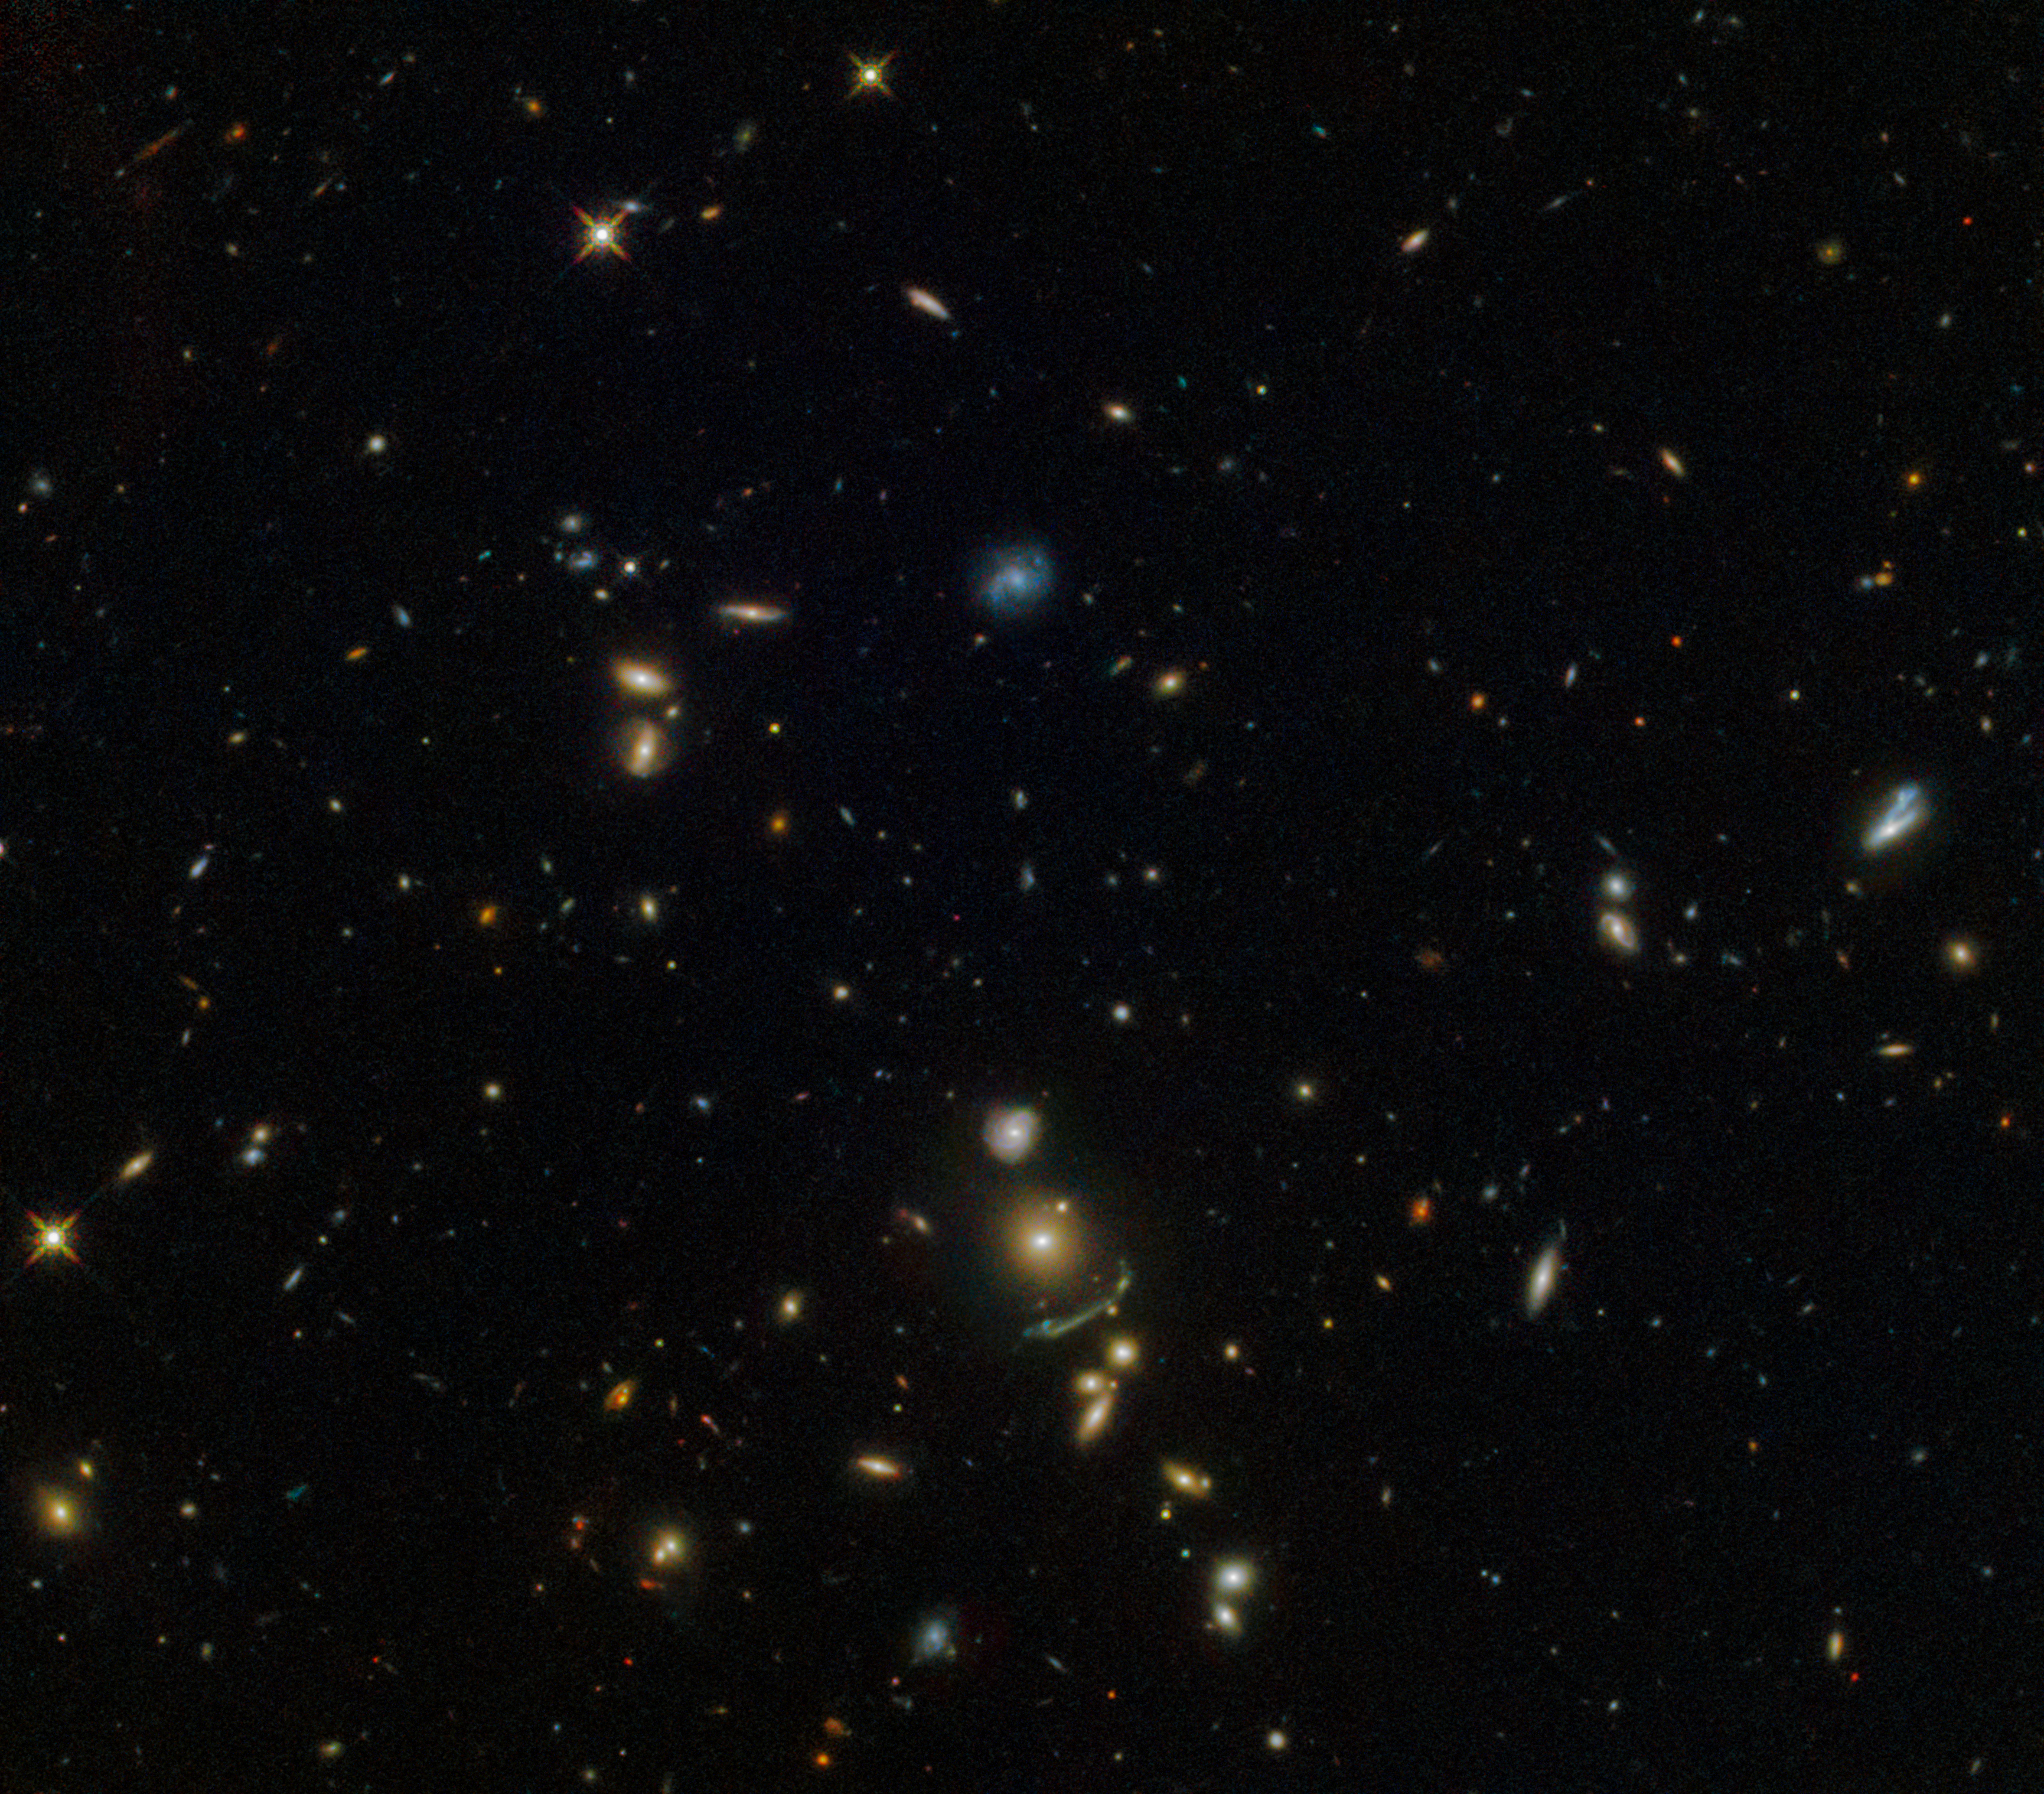

A green cosmic arc

This NASA/ESA Hubble Space Telescope image shows a cluster of hundreds of galaxies located about 7.5 billion light-years from Earth. The brightest galaxy within this cluster named SDSS J1156+1911 and known as the Brightest Cluster Galaxy (BCG), is visible in the lower middle of the frame. It was discovered by the Sloan Giant Arcs Survey which studied data maps covering huge parts of the sky from the Sloan Digital Sky Survey: it found more than 70 galaxies that look to be significantly affected by a cosmic phenomenon known as gravitational lensing.

Gravitational lensing is one of the predictions of Albert Einstein's General Theory of Relativity. The mass contained within a galaxy is so immense that it can actually warp and bend the very fabric of its surroundings (known as spacetime), forcing the light to travel along curved paths. As a result, the image of a more distant galaxy appears distorted and amplified to an observer, as the light from it has been bent around the intervening galaxy. This effect can be very useful in astronomy, allowing astronomers to see galaxies that are either obscured or too distant for us to be otherwise detected by our current instruments.

Galaxy clusters are giant structures containing hundreds to thousands of galaxies with masses of about over one million billion times the mass of the Sun! SDSS J1156+1911 is only roughly 600 billion times the mass of the Sun, making it less massive than the average galaxy. However, it is massive enough to produce the fuzzy greenish streak seen just below the brightest galaxy — the lensed image of a more distant galaxy.

Credit: ESA/Hubble & NASA Acknowledgement: Judy Schmidt (Geckzilla)